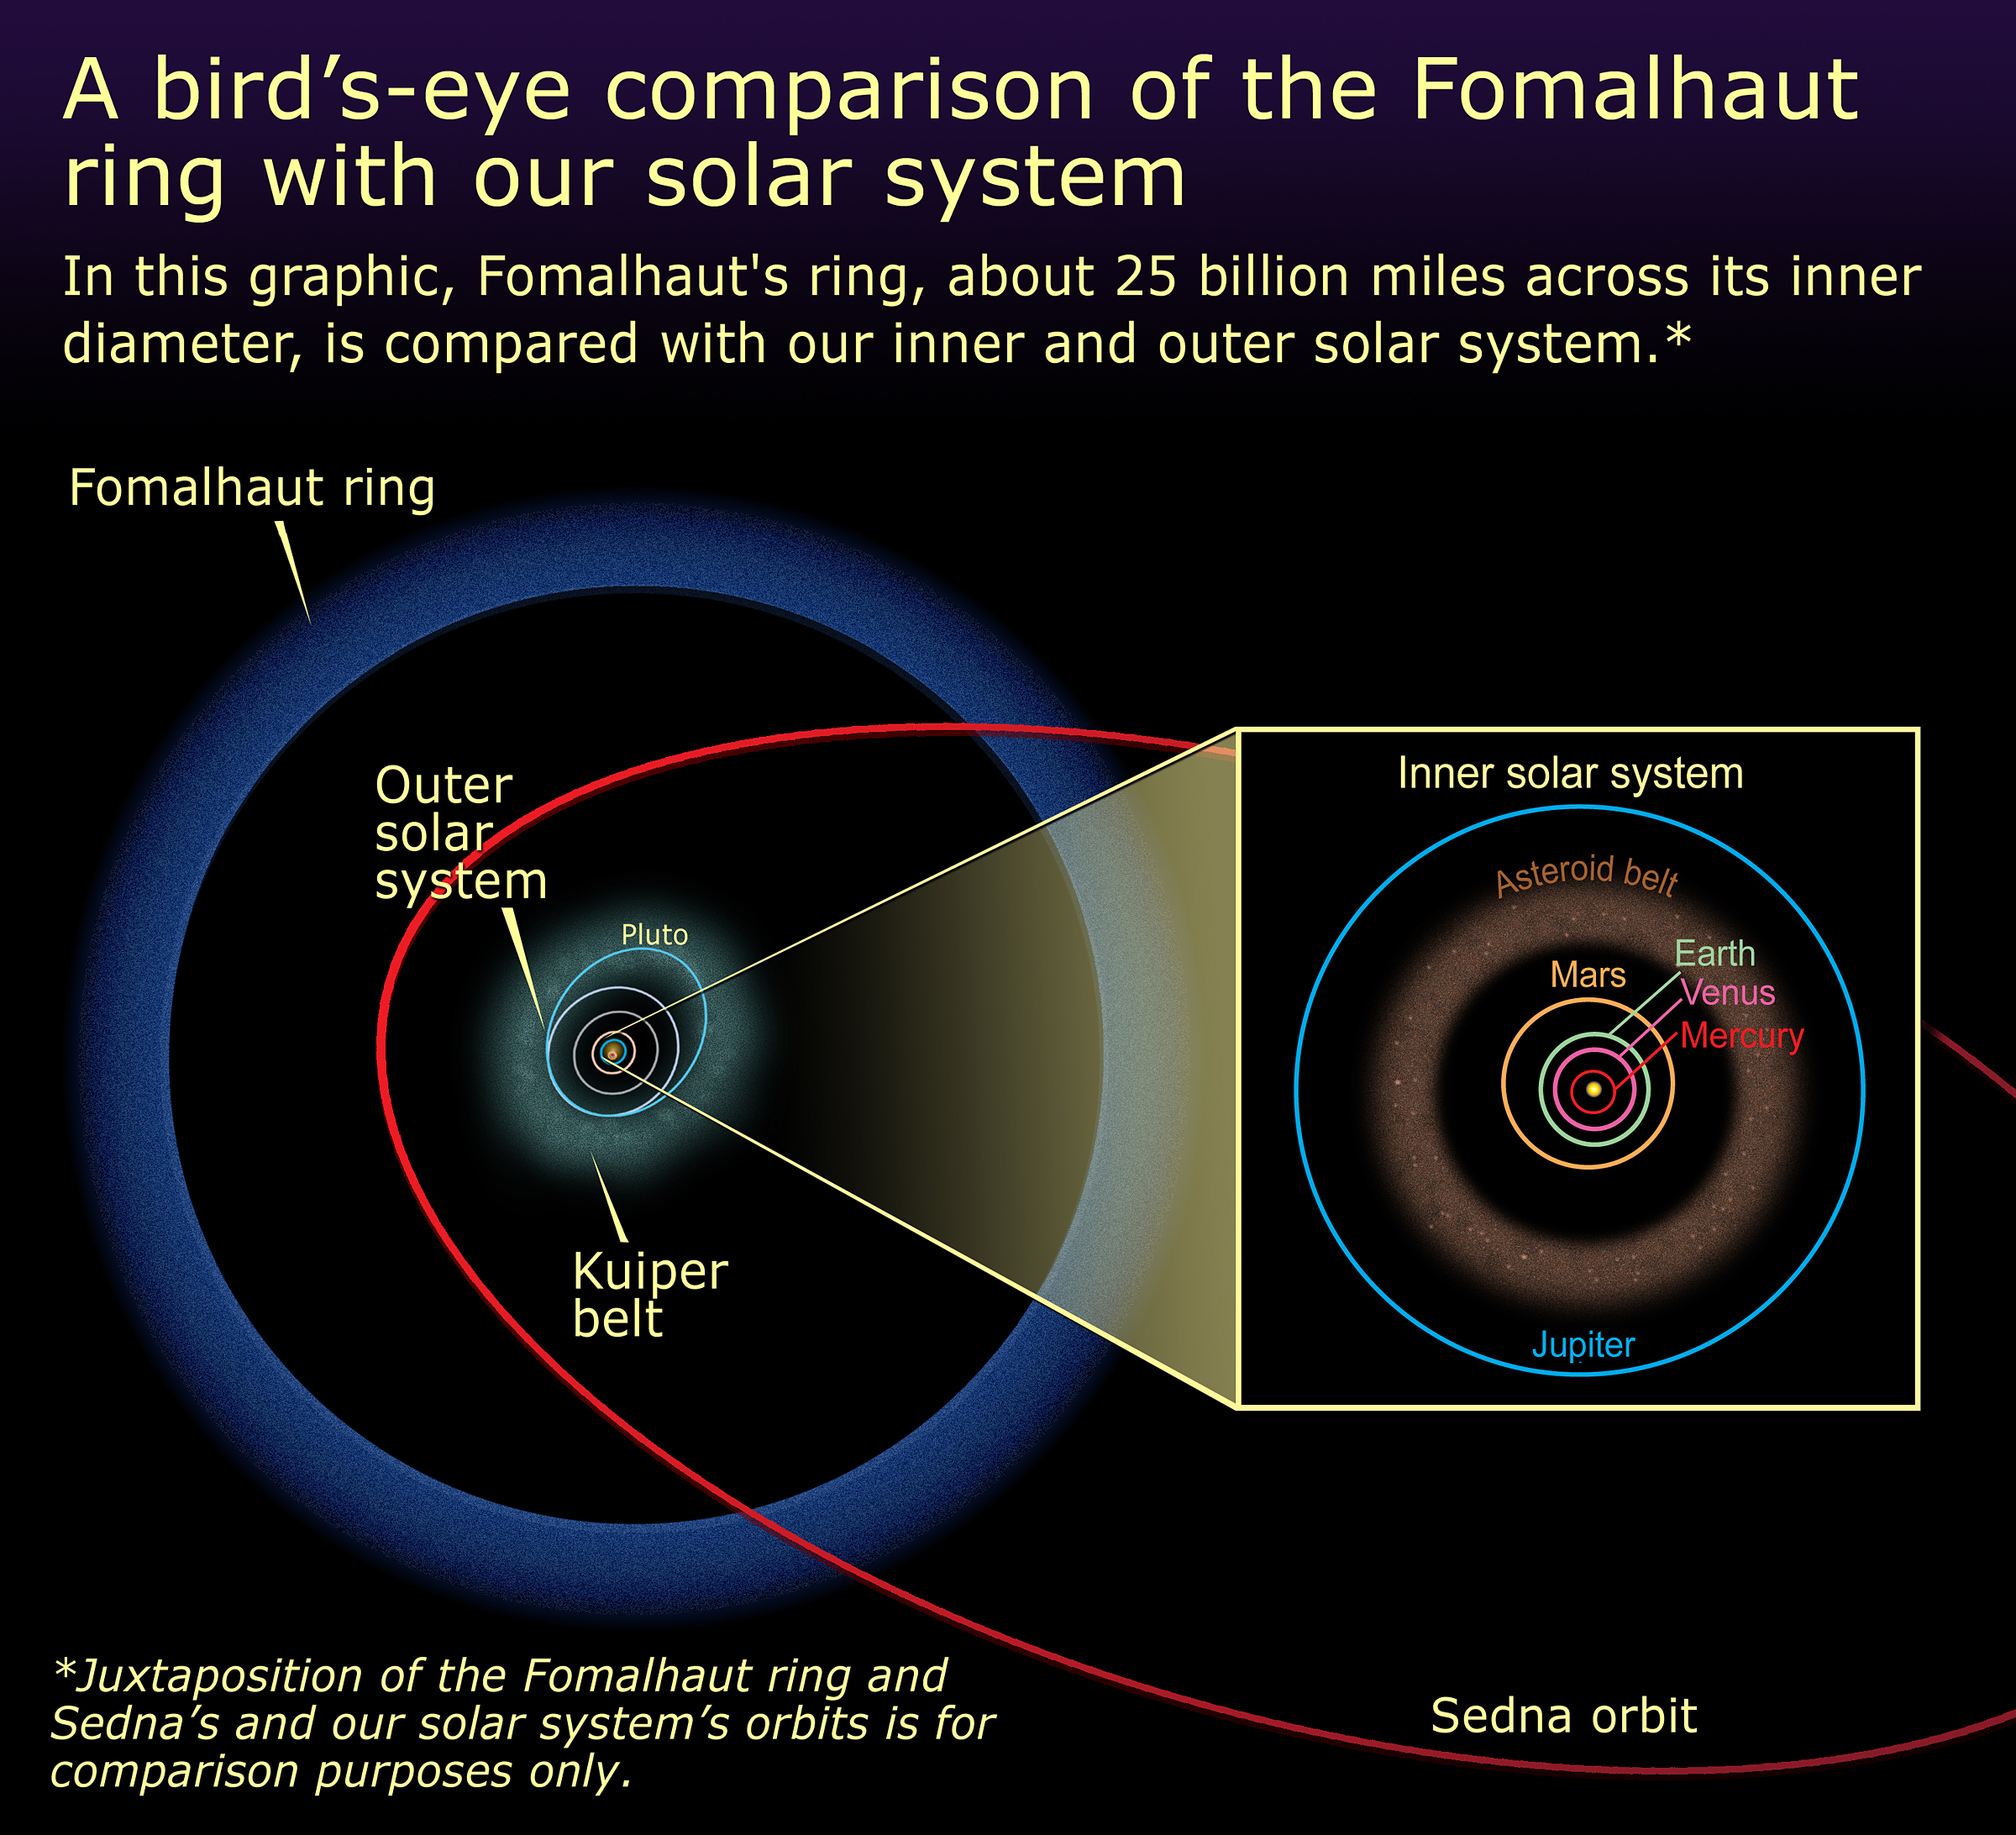

Fomalhaut ring system - size comparison with Solar System

A bird's-eye comparison of the Fomalhaut ring with our solar system. In this graphic, Fomalhaut's ring, about 25 billion miles (about 40 billion kilometres) across its inner diameter, is compared with our inner and outer solar system.

Credit: NASA, ESA and A. Feild (STScI)